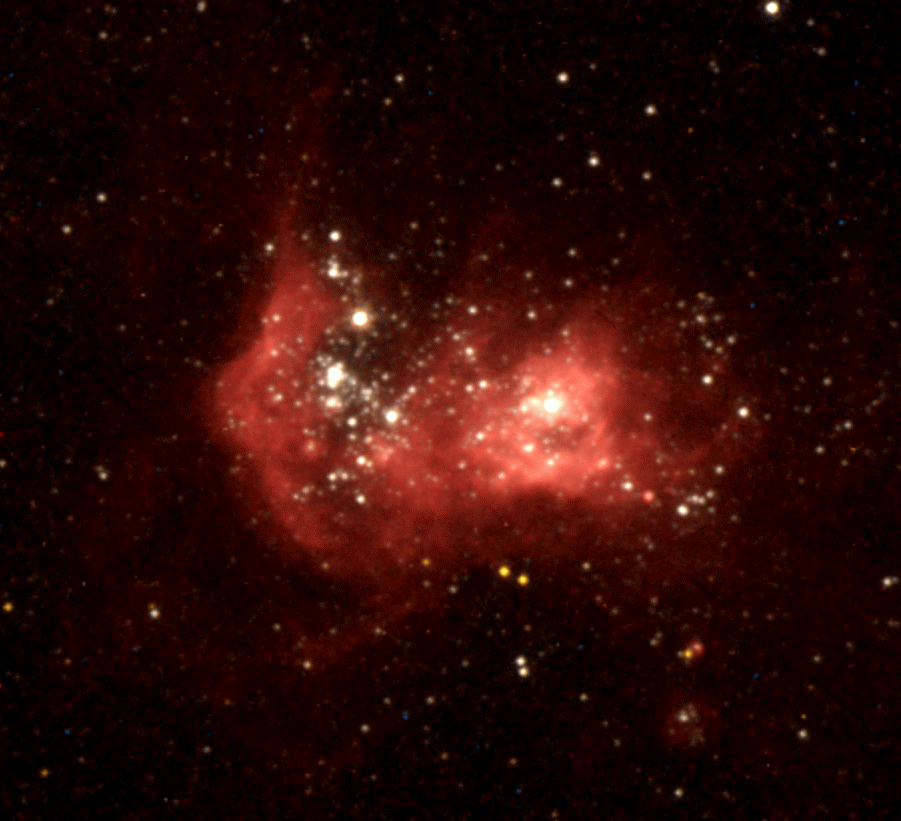

Star-Forming Region in Galaxy NGC 2366

Clusters of stars and a fishhook-shaped cloud of luminescent gases glow brilliantly in NGC 2363, a giant star-forming region in the Magellanic galaxy NGC 2366.

The brightest star visible on this image (at the tip of the fishhook) is a rare class called an erupting Luminous Blue Variable (LBV). This monstrous star (30 to 60 times as massive as the Sun) is in a very unstable, eruptive phase of its life.

Credit: Laurent Drissen, Jean-Rene Roy and Carmelle Robert (Department de Physique and Observatoire du mont Megantic, Universite Laval) and NASA/ESA